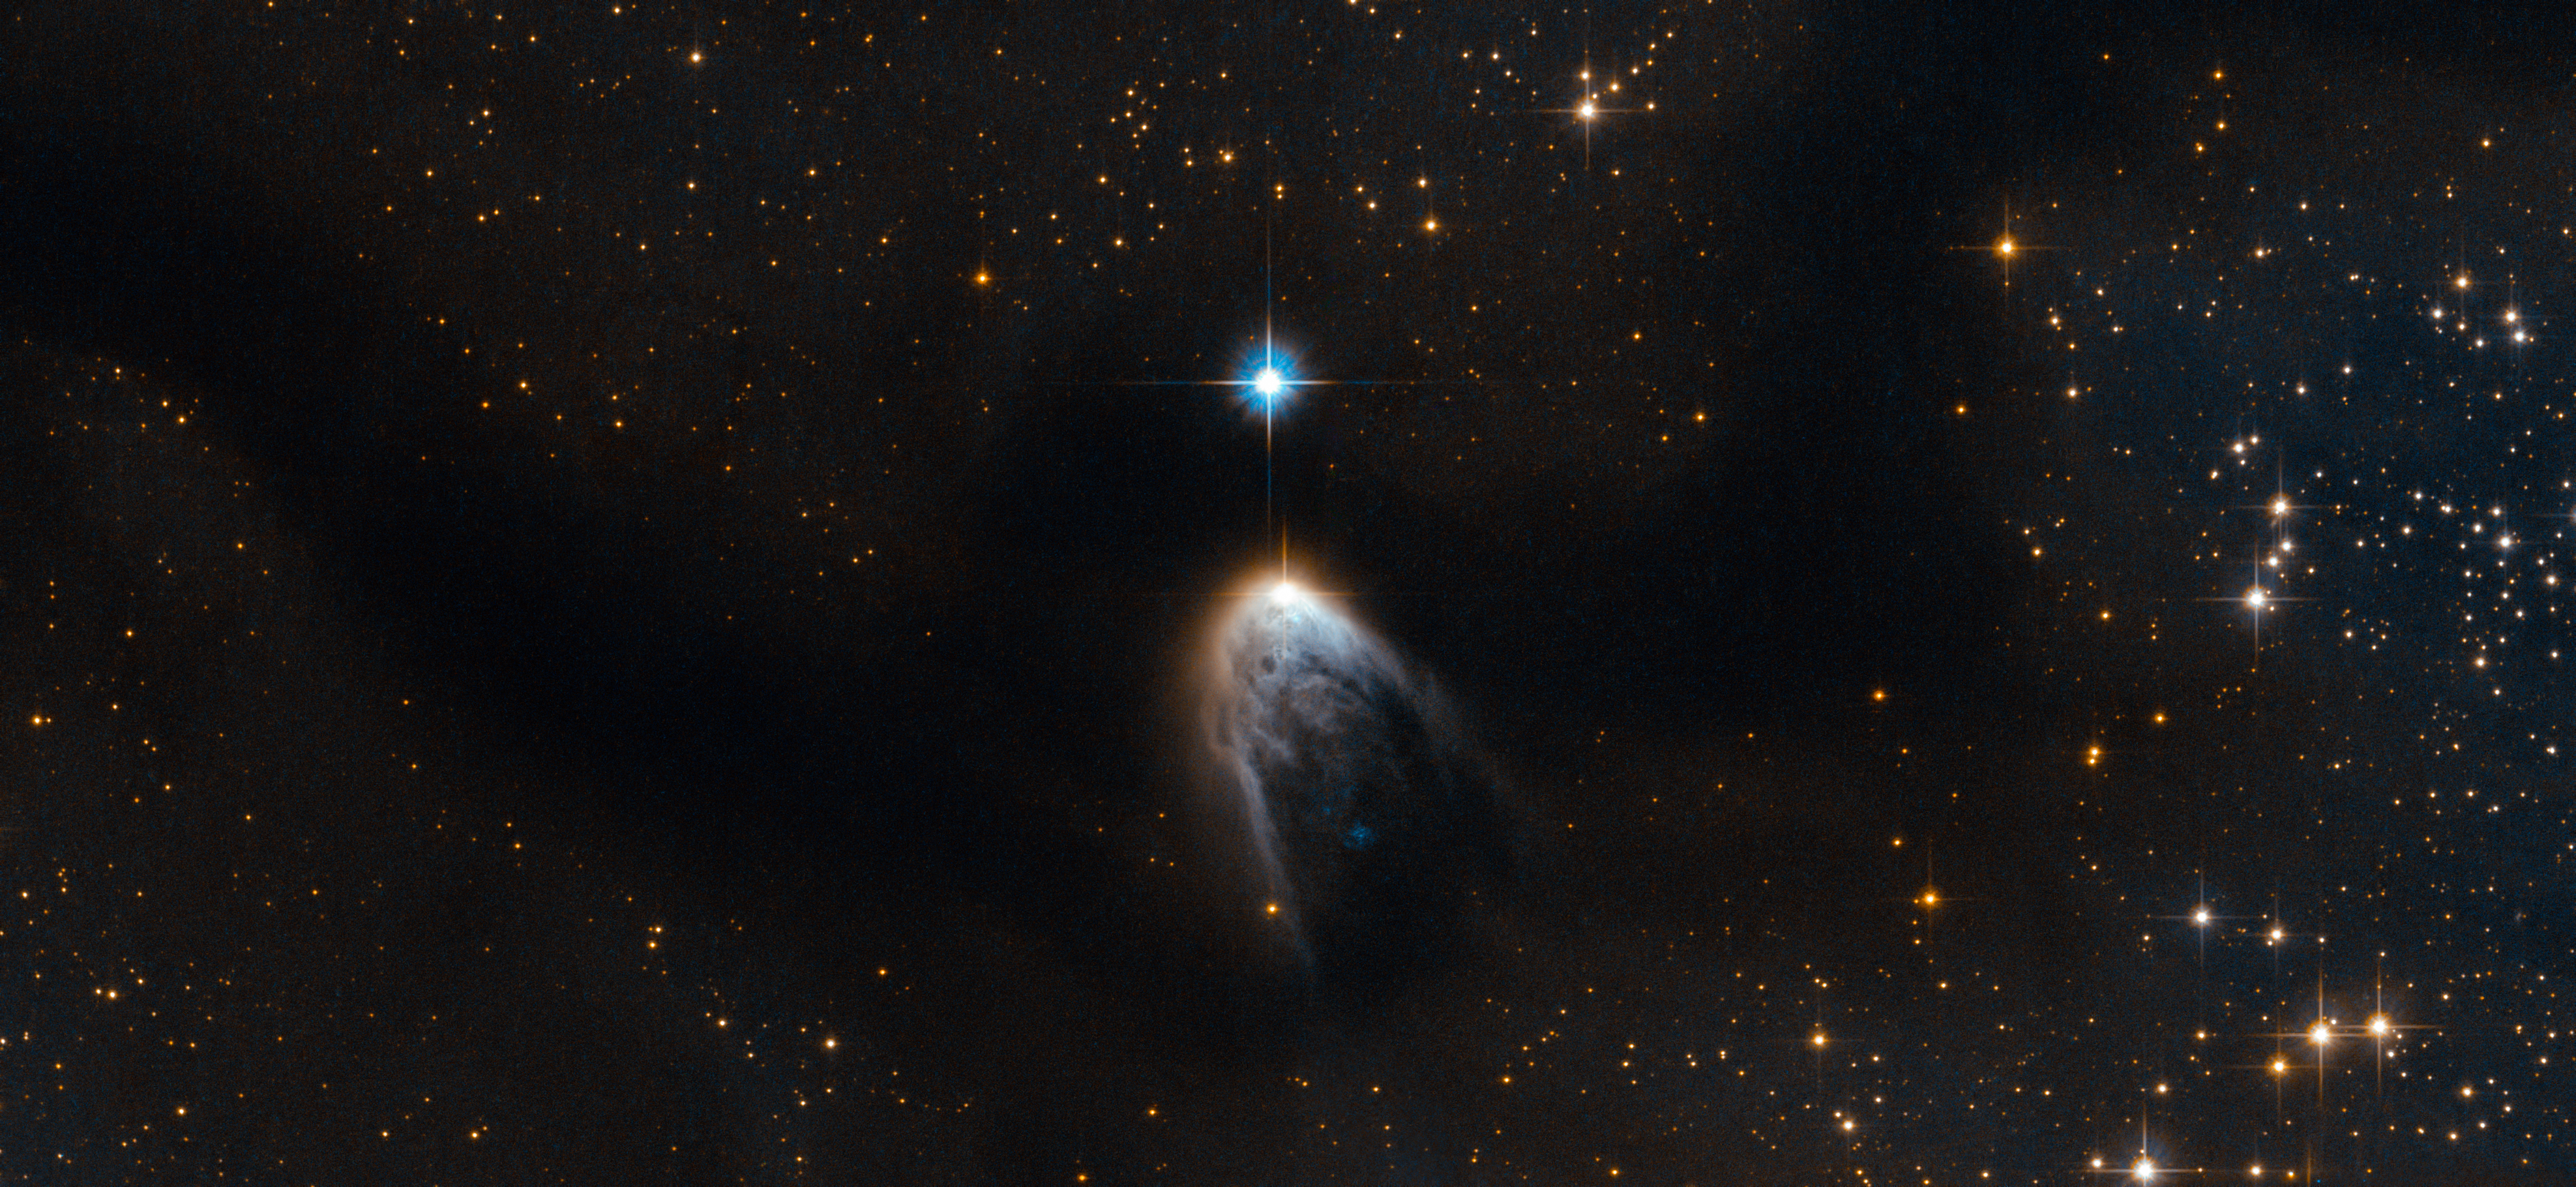

Violent birth announcement from an infant star

This new Hubble image shows IRAS 14568-6304, a young star that is cloaked in a haze of golden gas and dust. It appears to be embedded within an intriguing swoosh of dark sky, which curves through the image and obscures the sky behind.

This dark region is known as the Circinus molecular cloud. This cloud has a mass around 250 000 times that of the Sun, and it is filled with gas, dust and young stars. Within this cloud lie two prominent and enormous regions known colloquially to astronomers as Circinus-West and Circinus-East. Each of these clumps has a mass of around 5000 times that of the Sun, making them the most prominent star-forming sites in the Circinus cloud. The clumps are associated with a number of young stellar objects, and IRAS 14568-6304, featured here under a blurry fog of gas within Circinus-West, is one of them.

IRAS 14568-6304 is special because it is driving a protostellar jet, which appears here as the "tail" below the star. This jet is the leftover gas and dust that the star took from its parent cloud in order to form. While most of this material forms the star and its accretion disc — the disc of material surrounding the star, which may one day form planets — at some point in the formation process the star began to eject some of the material at supersonic speeds through space. This phenomenon is not only beautiful, but can also provide us with valuable clues about the process of star formation.

IRAS 14568-6304 is one of several outflow sources in the Circinus-West clump. Together, these sources make up one of the brightest, most massive, and most energetic outflows ever reported. Scientists have even suggested calling Circinus-West the "nest of molecular outflows" in tribute to this activity.

A version of this image was entered into the Hubble's Hidden Treasures image processing competition by contestant Serge Meunier.

Credit: ESA/Hubble & NASA Acknowledgements: R. Sahai (Jet Propulsion Laboratory), Serge Meunier